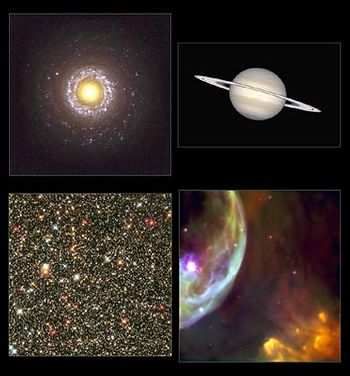

Heritage montage

A vibrant celestial photo album of some of NASA/ESA Hubble SpaceTelescope's most stunning views of the universe is being unveiled today on the Internet. Called the Hubble Heritage Program, this technicolor gallery is being assembled by a team of astronomers at Hubble's science operations center, the Space Telescope Science Institute in Baltimore, Md. The four images released today are (top row, left to right) spiral galaxy NGC 7742 and Saturn, and (bottom row, left to right) the Sagittarius Star Cloud and the Bubble Nebula.

Credit: Hubble Heritage Team (AURA/STScI/NASA/ESA)